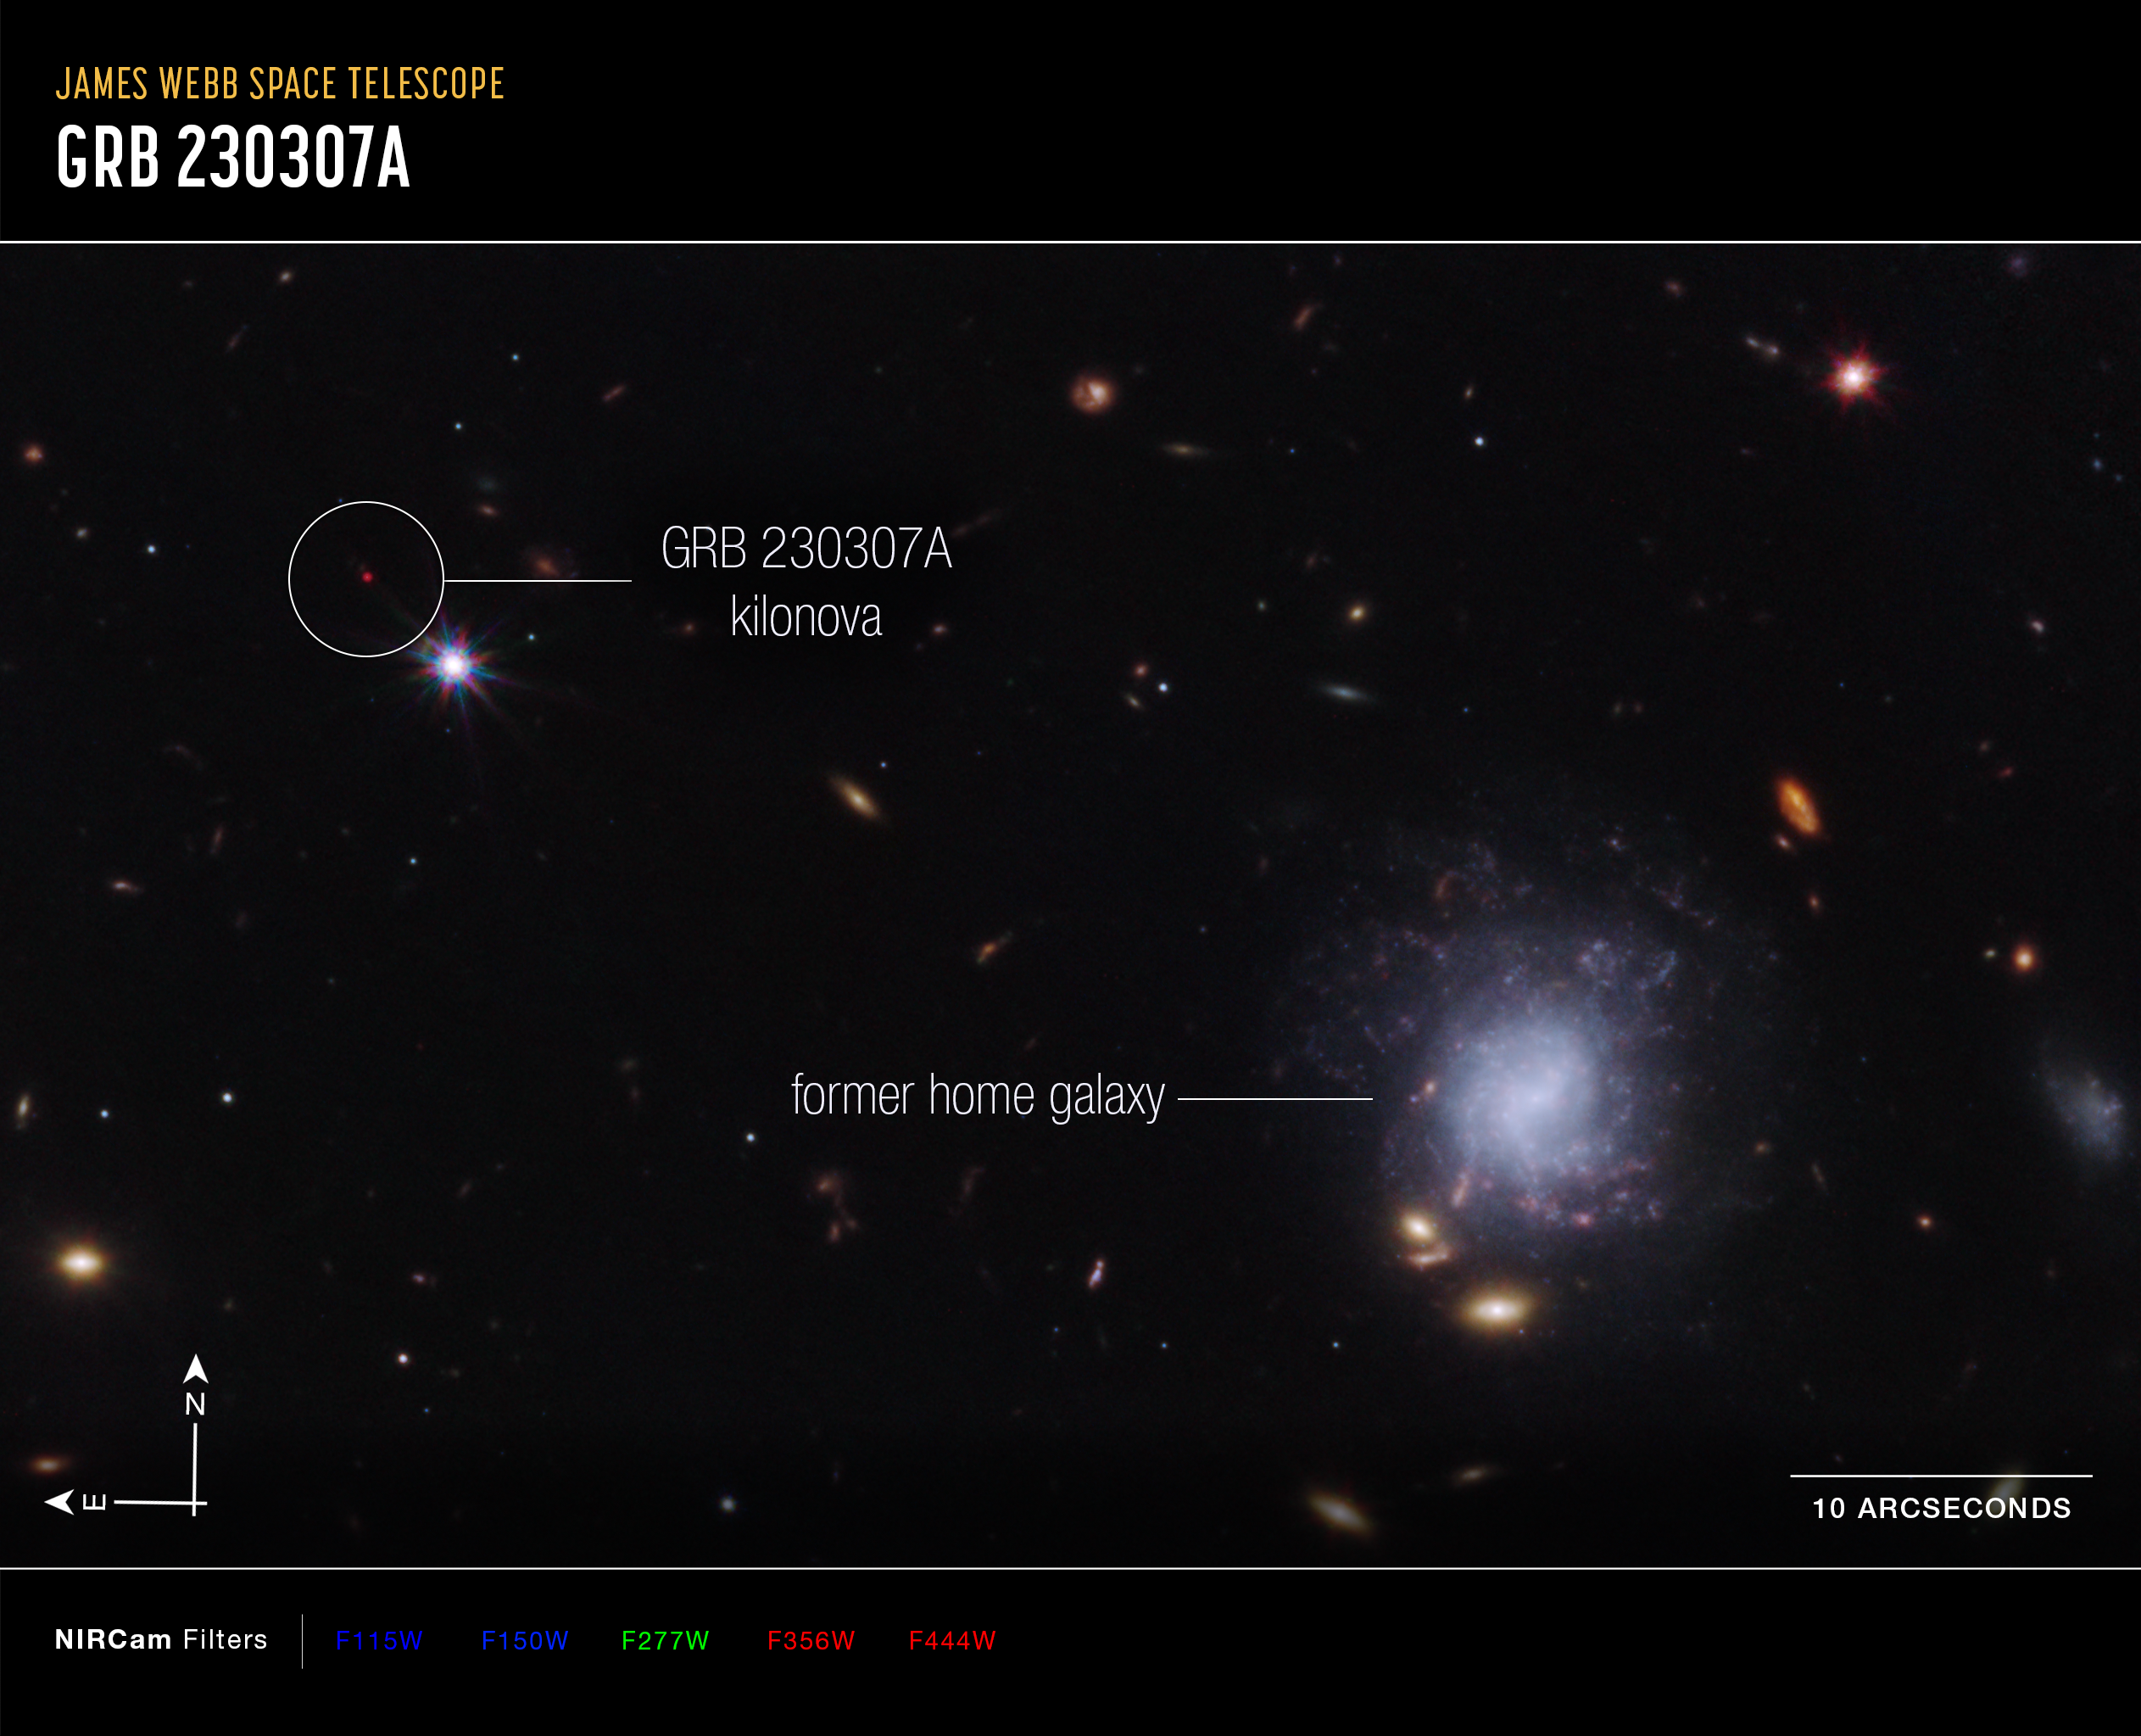

Kilonova and host galaxy (annotated)

A team of scientists has used the NASA/ESA/CSA James Webb Space Telescope to observe an exceptionally bright gamma-ray burst, GRB 230307A, and its associated kilonova. Kilonovas—an explosion produced by a neutron star merging with either a black hole or with another neutron star—are extremely rare, making it difficult to observe these events. The highly sensitive infrared capabilities of Webb helped scientists identify the home address of the two neutron stars that created the kilonova.

This image from Webb’s NIRCam (Near-Infrared Camera) instrument highlights GRB 230307A’s kilonova and its former home galaxy among their local environment of other galaxies and foreground stars. The neutron stars were kicked out of their home galaxy and travelled the distance of about 120,000 light-years, approximately the diameter of the Milky Way galaxy, before finally merging several hundred million years later.

This image is a composite of separate exposures acquired by the James Webb Space Telescope using the NIRCam instrument. Several filters were used to sample wide wavelength ranges. The colour results from assigning different hues (colours) to each monochromatic (grayscale) image associated with an individual filter. In this case, the assigned colours are: Blue: F115W + F150W Green: F277W Red: F356W + F444W

Credit: NASA, ESA, CSA, STScI, A. Levan (IMAPP, Warw), A. Pagan (STScI)